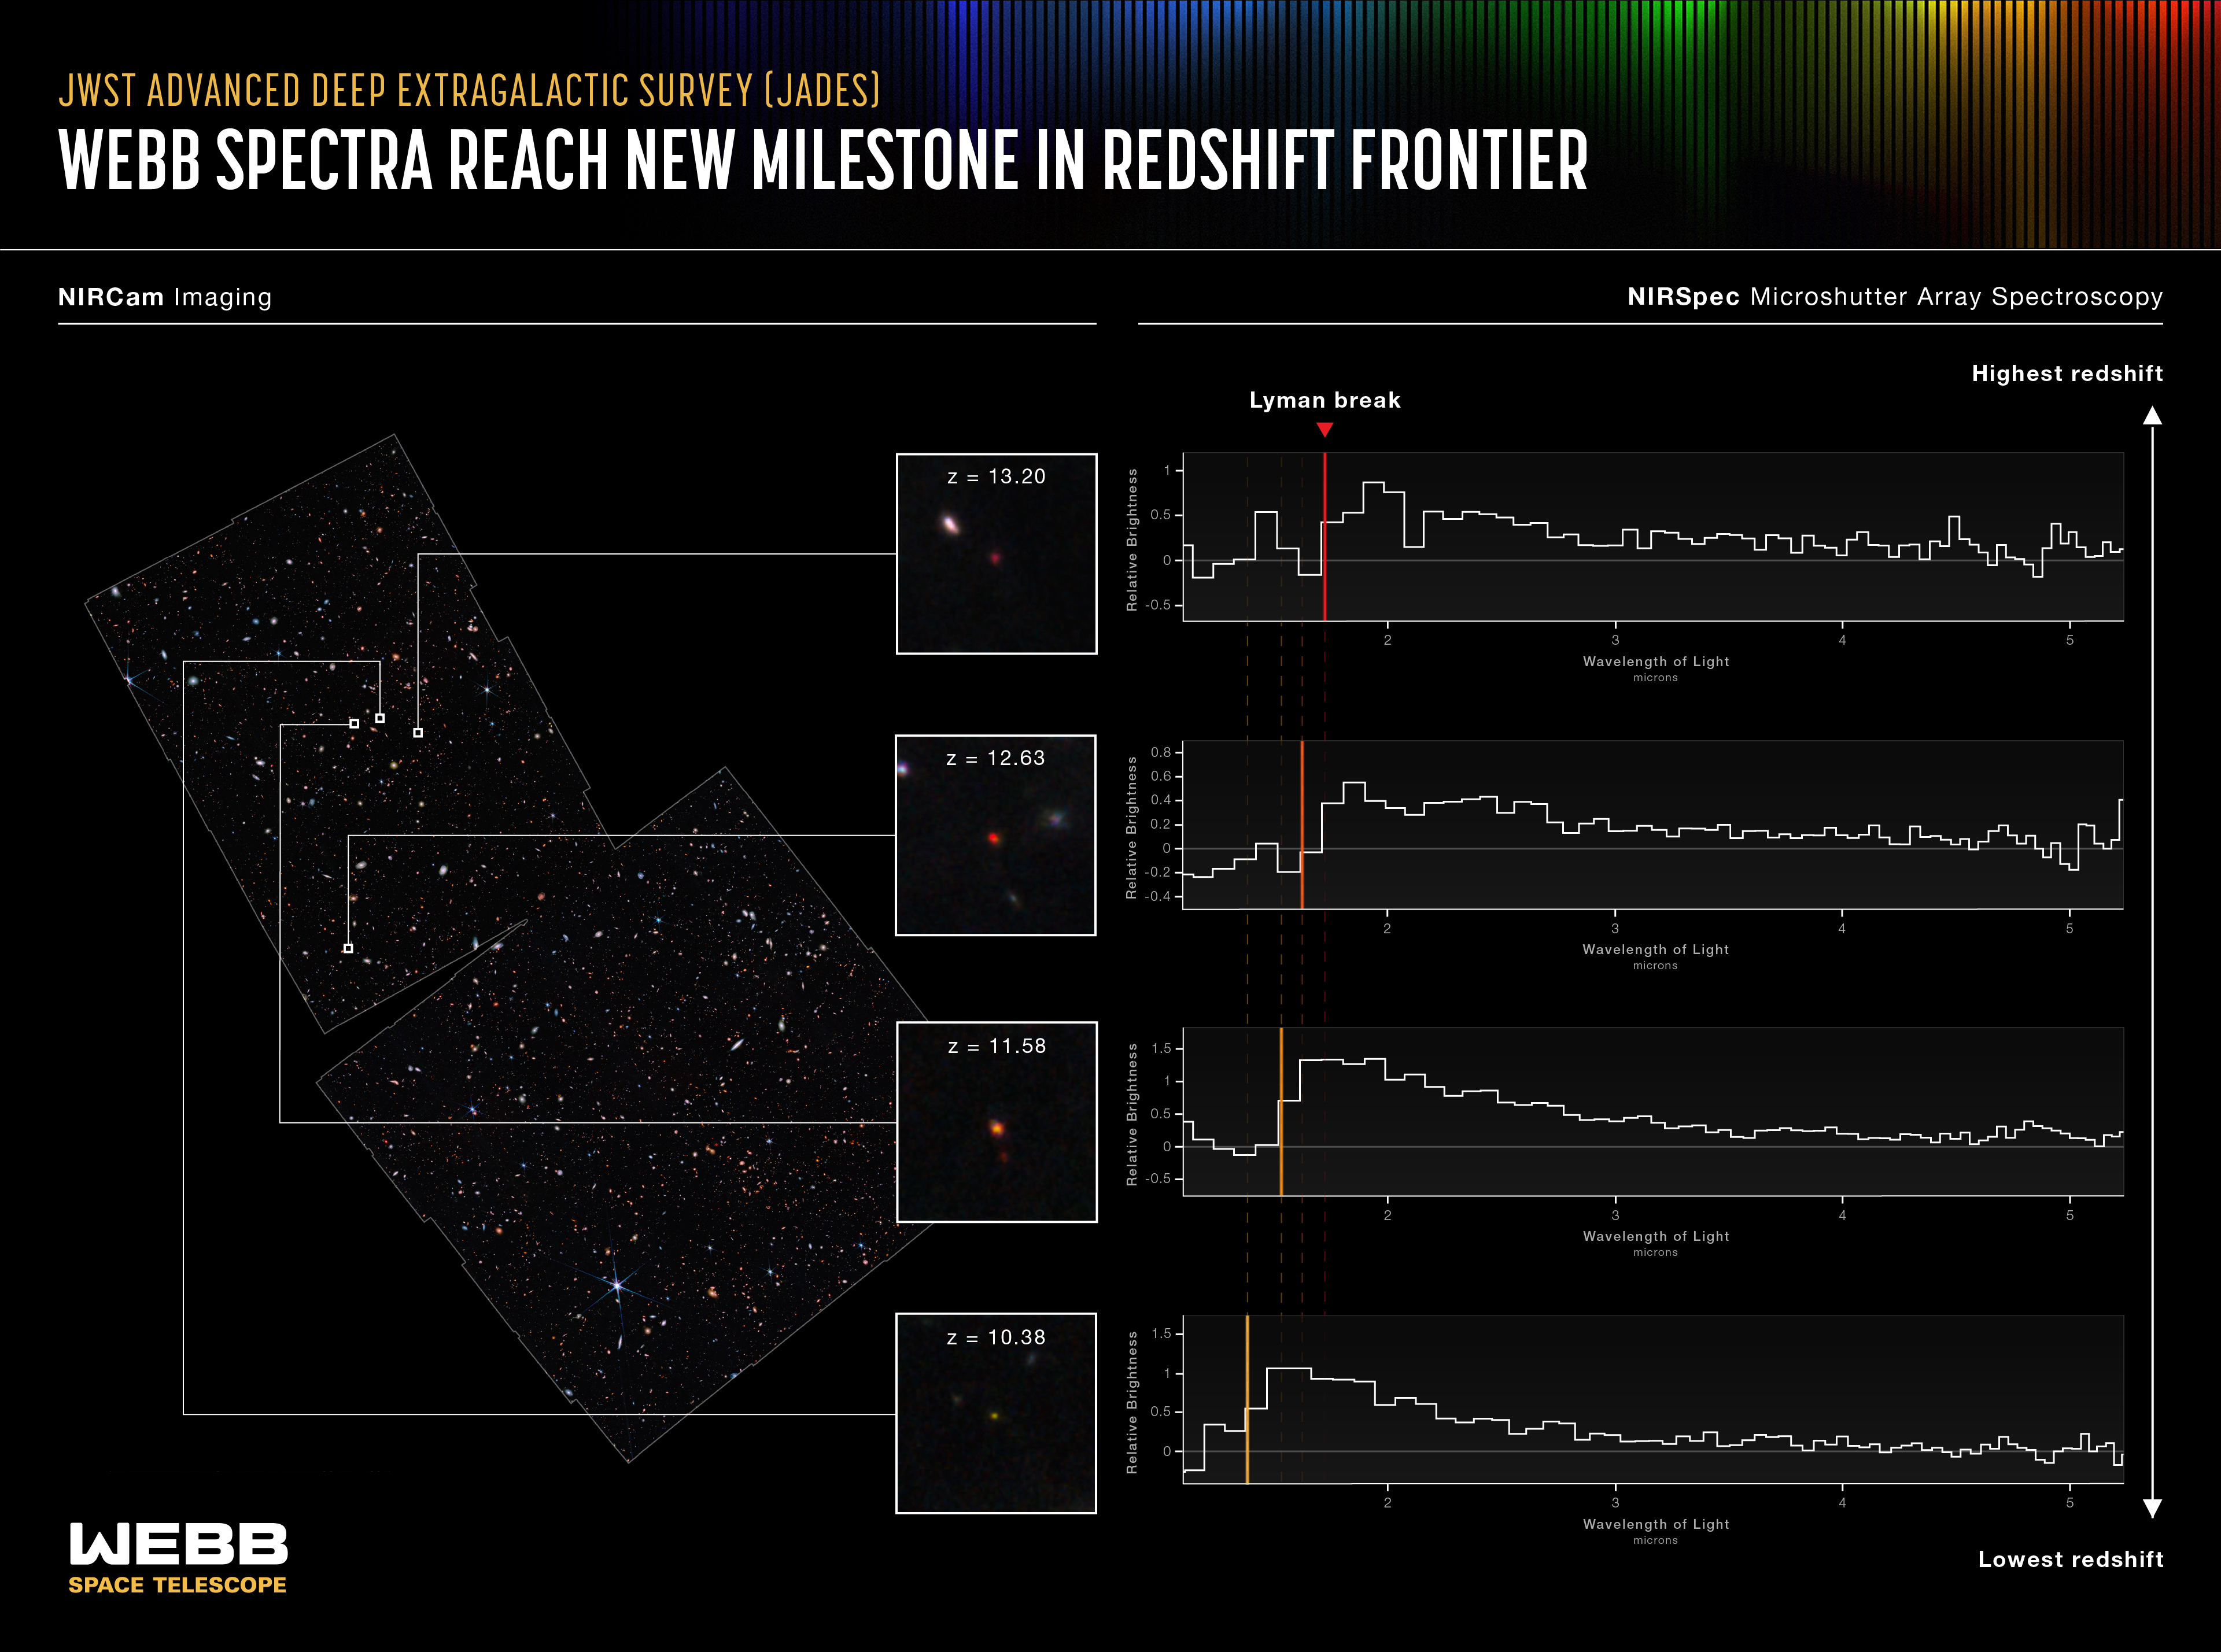

Webb Reaches New Milestone in Quest for Distant Galaxies

An international team of astronomers has used data from the NASA/ESA/CSA James Webb Space Telescope to report the discovery of the earliest galaxies confirmed to date. The light from these galaxies has taken more than 13.4 billion years to reach us, as these galaxies date back to less than 400 million years after the big bang, when the universe was only 2% of its current age.

Note: This post highlights data from Webb science in progress, which has not yet been through the peer-review process.

Earlier data from Webb had provided candidates for such infant galaxies. Now, these targets have been confirmed by obtaining spectroscopic observations, revealing characteristic and distinctive patterns in the fingerprints of light coming from these incredibly faint galaxies.

“It was crucial to prove that these galaxies do, indeed, inhabit the early universe. It’s very possible for closer galaxies to masquerade as very distant galaxies,” said astronomer and co-author Emma Curtis-Lake from the University of Hertfordshire in the United Kingdom. “Seeing the spectrum revealed as we hoped, confirming these galaxies as being at the true edge of our view, some further away than Hubble could see! It is a tremendously exciting achievement for the mission.”

The observations resulted from a collaboration of scientists who led the development of two of the instruments on board Webb, the Near-Infrared Camera (NIRCam) and the Near-Infrared Spectrograph (NIRSpec). The investigation of the faintest and earliest galaxies was the leading motivation behind the concepts for these instruments. In 2015 the instrument teams joined together to propose the JWST Advanced Deep Extragalactic Survey (JADES), an ambitious program that has been allocated just over one month of the telescope’s time spread over two years, and is designed to provide a view of the early universe unprecedented in both depth and detail. JADES is an international collaboration of more than eighty astronomers from ten countries. “These results are the culmination of why the NIRCam and NIRSpec teams joined together to execute this observing program,” shared co-author Marcia Rieke, NIRCam principal investigator, of the University of Arizona in Tucson.

The first round of JADES observations focused on the area in and around the NASA/ESA Hubble Space Telescope’s Ultra Deep Field. For over 20 years, this small patch of sky has been the target of nearly all large telescopes, building an exceptionally sensitive data set spanning the full electromagnetic spectrum. Now Webb is adding its unique view, providing the faintest and sharpest images yet obtained.

The JADES program began with NIRCam, using over 10 days of mission time to observe the field in nine different infrared colors, and producing exquisite images of the sky. The region is 15 times larger than the deepest infrared images produced by the Hubble Space Telescope, yet is even deeper and sharper at these wavelengths. The image is only the size a human appears when viewed from a mile away. However, it teems with nearly 100,000 galaxies, each caught at some moment in their history, billions of years in the past.

“For the first time, we have discovered galaxies only 350 million years after the big bang, and we can be absolutely confident of their fantastic distances,” shared co-author Brant Robertson from the University of California Santa Cruz, a member of the NIRCam science team. “To find these early galaxies in such stunningly beautiful images is a special experience.”

From these images, the galaxies in the early universe can be distinguished by a tell-tale aspect of their multi-wavelength colours. Light is stretched in wavelength as the universe expands, and the light from these youngest galaxies has been stretched by a factor of up to 14. Astronomers search for faint galaxies that are visible in the infrared but whose light abruptly cuts off at a critical wavelength. The location of the cutoff within each galaxy’s spectrum is shifted by the universe’s expansion. The JADES team scoured the Webb images looking for these distinctive candidates.

They then used the NIRSpec instrument, for a single observation period spanning three days totaling 28 hours of data collection. The team collected the light from 250 faint galaxies, allowing astronomers to study the patterns imprinted on the spectrum by the atoms in each galaxy. This yielded a precise measurement of each galaxy’s redshift and revealed the properties of the gas and stars in these galaxies.

“These are by far the faintest infrared spectra ever taken,” said astronomer and co-author Stefano Carniani from Scuola Normale Superiore in Italy. “They reveal what we hoped to see: a precise measurement of the cutoff wavelength of light due to the scattering of intergalactic hydrogen.”

Four of the galaxies studied are particularly special, as they were revealed to be at an unprecedentedly early epoch. The results provided spectroscopic confirmation that these four galaxies lie at redshifts above 10, including two at redshift 13. This corresponds to a time when the universe was approximately 330 million years old, setting a new frontier in the search for far-flung galaxies. These galaxies are extremely faint because of their great distance from us. Astronomers can now explore their properties, thanks to Webb’s exquisite sensitivity.

Astronomer and co-author Sandro Tacchella from the University of Cambridge in the United Kingdom explained, “It is hard to understand galaxies without understanding the initial periods of their development. Much as with humans, so much of what happens later depends on the impact of these early generations of stars. So many questions about galaxies have been waiting for the transformative opportunity of Webb, and we're thrilled to be able to play a part in revealing this story."

JADES will continue in 2023 with a detailed study of another field, this one centered on the iconic Hubble Deep Field, and then return to the Ultra Deep Field for another round of deep imaging and spectroscopy. Many more candidates in the field await spectroscopic investigation, with hundreds of hours of additional time already approved.

Credit: NASA, ESA, CSA, M. Zamani (ESA/Webb), Leah Hustak (STScI), Brant Robertson (UC Santa Cruz), S. Tacchella (Cambridge), E. Curtis-Lake (UOH), S. Carniani (Scuola Normale Superiore), JADES Collaboration